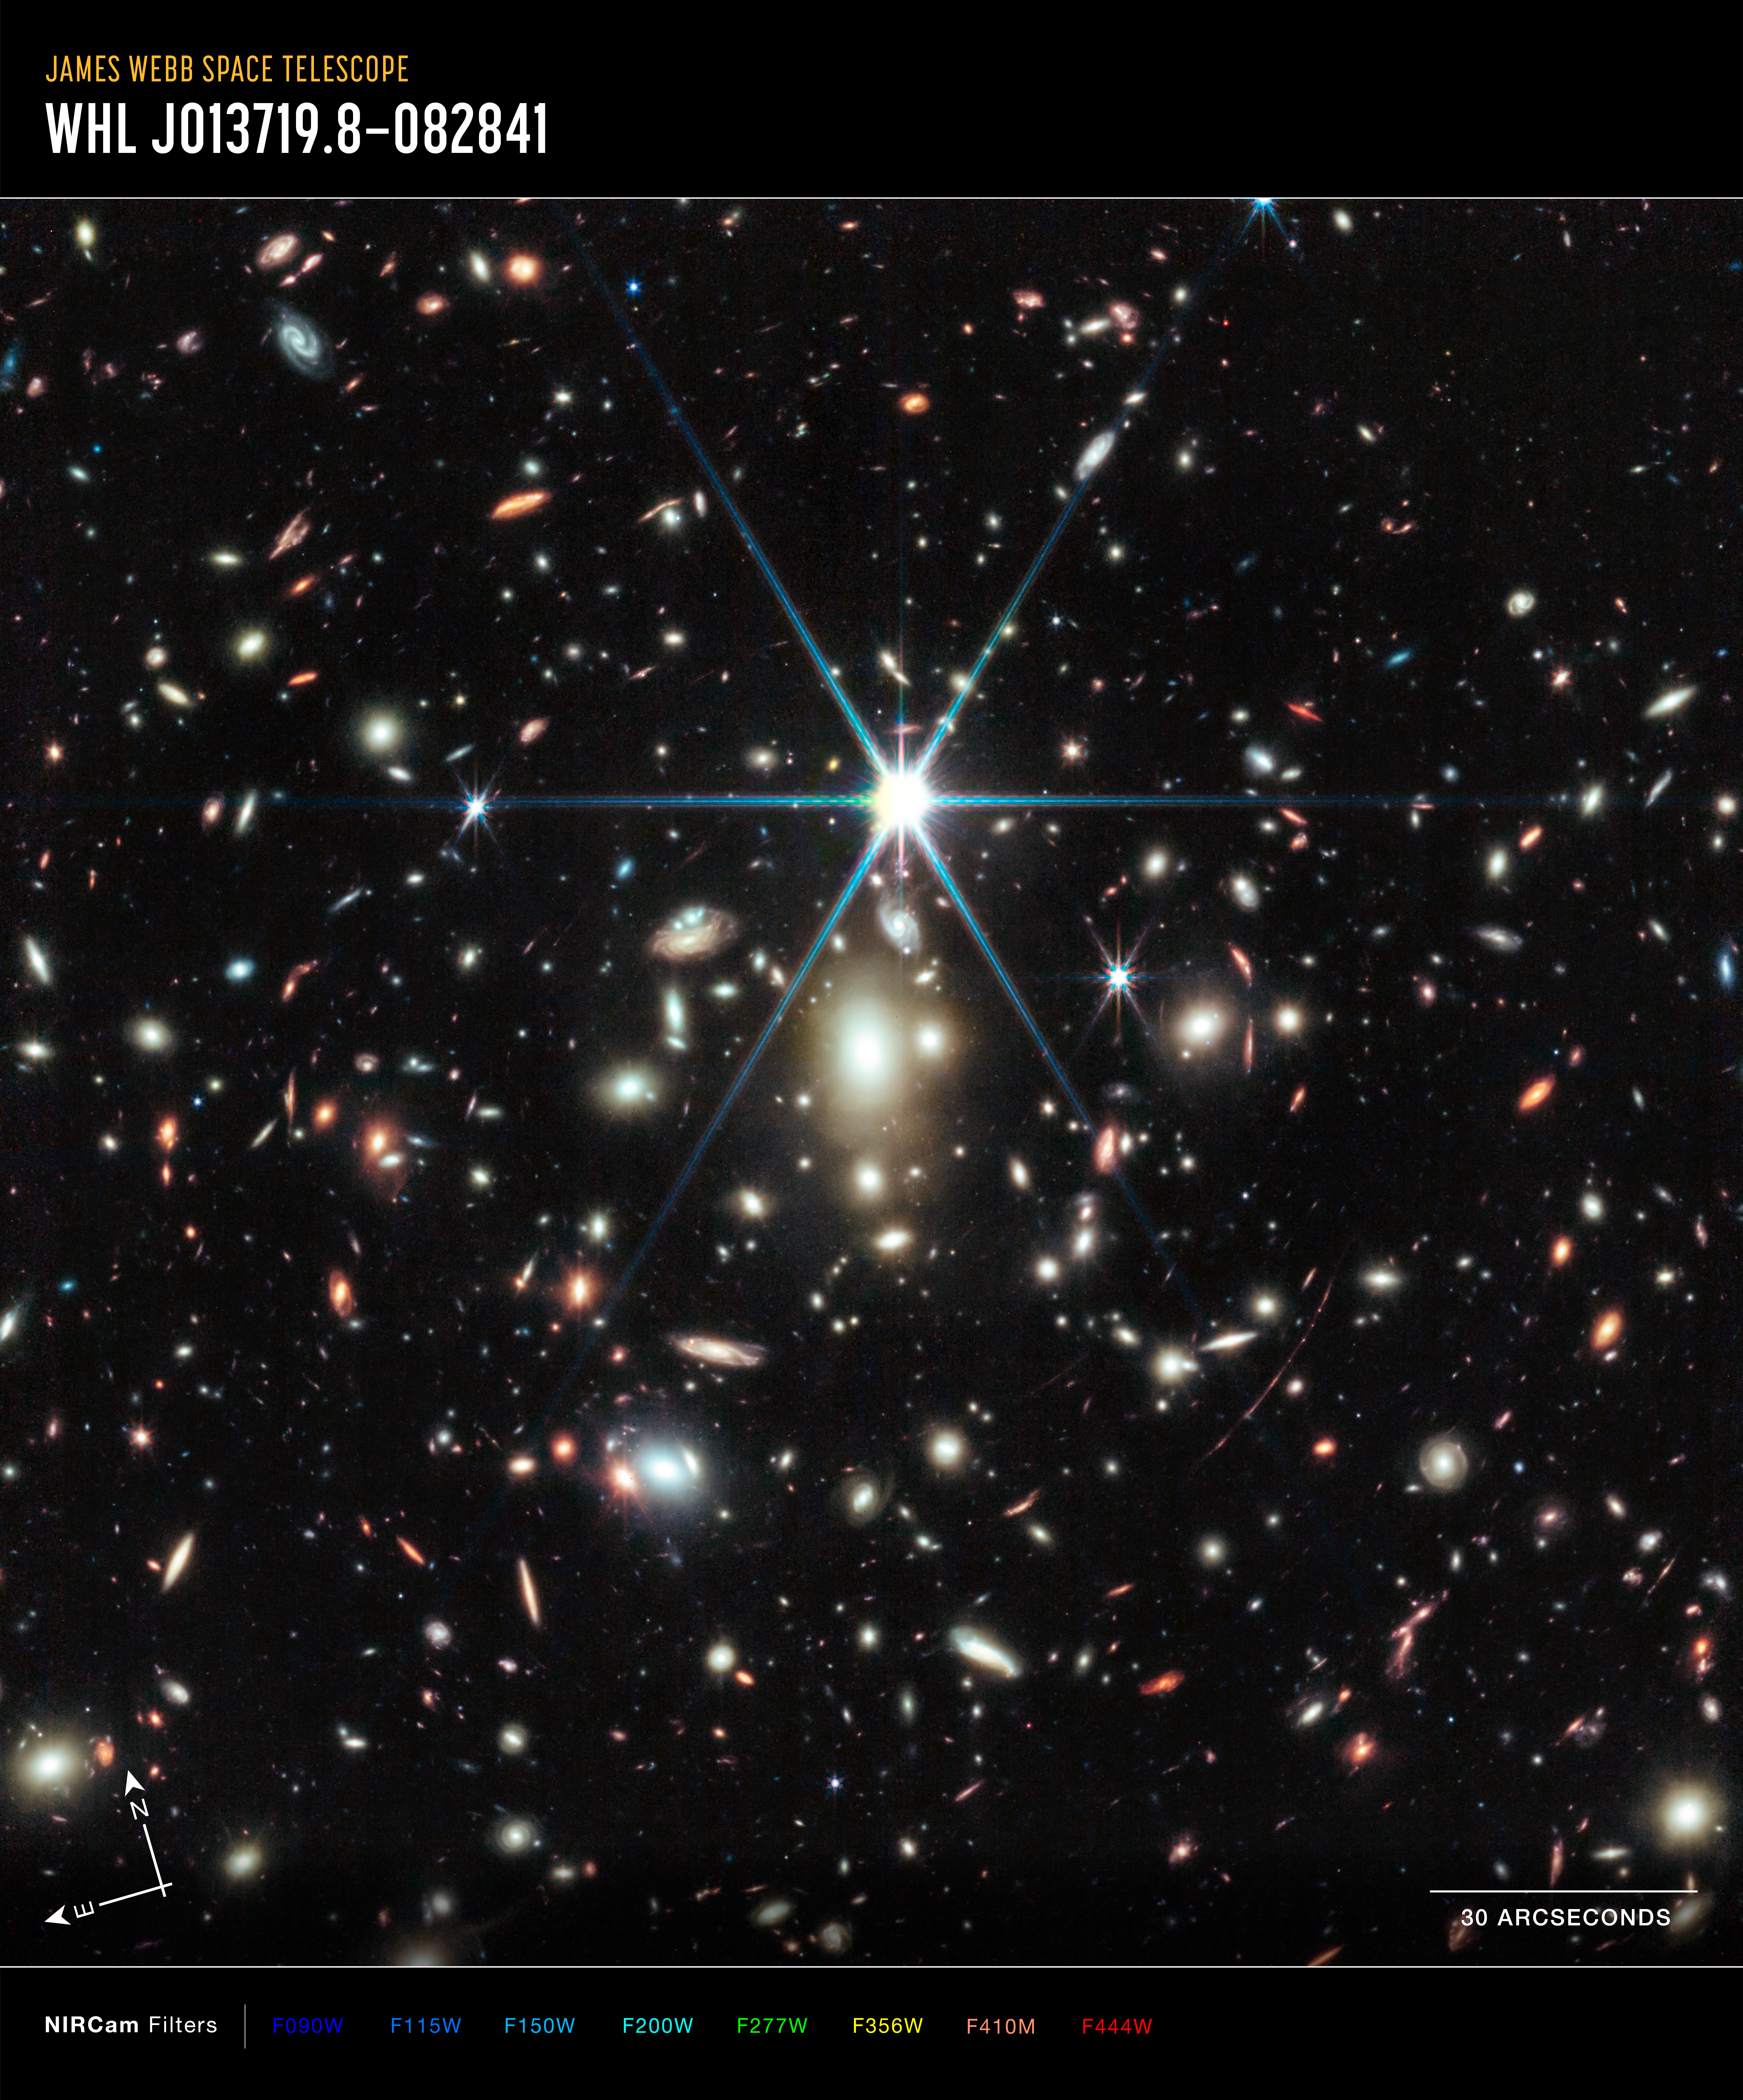

Galaxy cluster WHL0137-08 (annotated)

This is an image of the WHL0137-08 galaxy cluster, which includes the Sunrise Arc galaxy, with compass arrows, scale bar and colour key. The north and east compass arrows show the orientation of the image on the sky. Note that the relationship between north and east on the sky (as seen from below) is flipped relative to direction arrows on a map of the ground (as seen from above).

This image shows invisible near-infrared wavelengths of light that have been translated into visible-light colours. The colour key shows which NIRCam (Near-Infrared Camera) filters were used when collecting the light. The colour of each filter name is the visible light colour used to represent the infrared light that passes through that filter. Below the image is a colour key showing which NIRCam filters were used to create the image and which visible-light colour is assigned to each filter.

Learn more about this image here.

Credit: NASA, ESA, CSA, D. Coe (AURA/STScI for ESA), Z. Levay